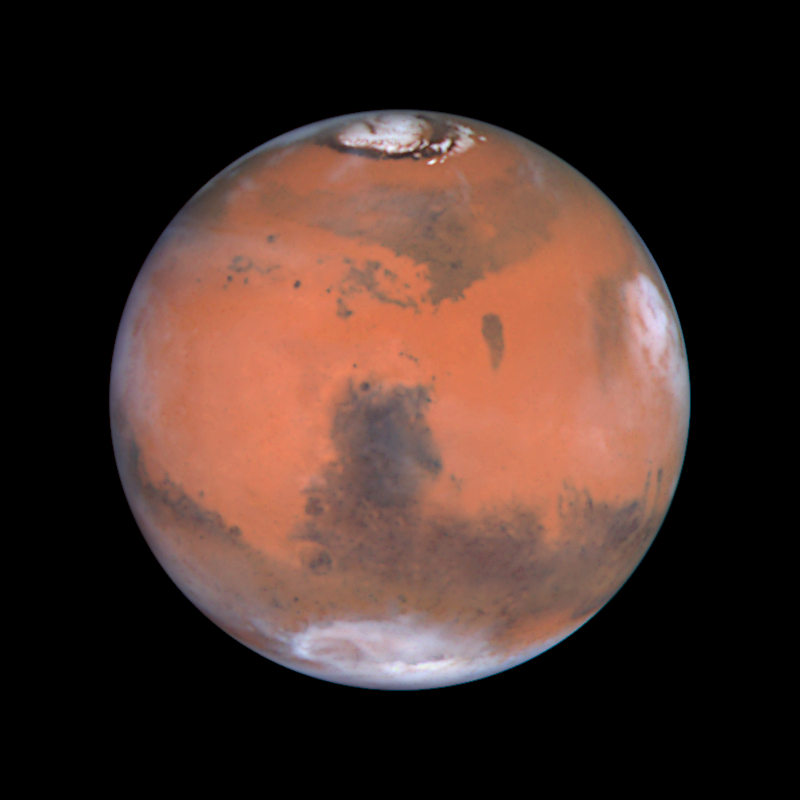

Mars at Opposition (the Syrtis Major Region)

This image is centered on the dark feature known as Syrtis Major, first seen telescopically by the astronomer Christiaan Huygens in the 17th century. Many small, dark, circular impact craters can be seen in this region, attesting to the Hubble telescope's ability to reveal fine detail on the planet's surface. To the south of Syrtis is a large circular feature called Hellas. Viking and more recently Mars Global Surveyor have revealed that Hellas is a large and deep impact crater. These Hubble telescope pictures show it to be filled with surface frost and water ice clouds. Along the right limb, late afternoon clouds have formed around the volcano Elysium.

Credit: Steve Lee (University of Colorado), Jim Bell (Cornell University), Mike Wolff (Space Science Institute), and NASA/ESA